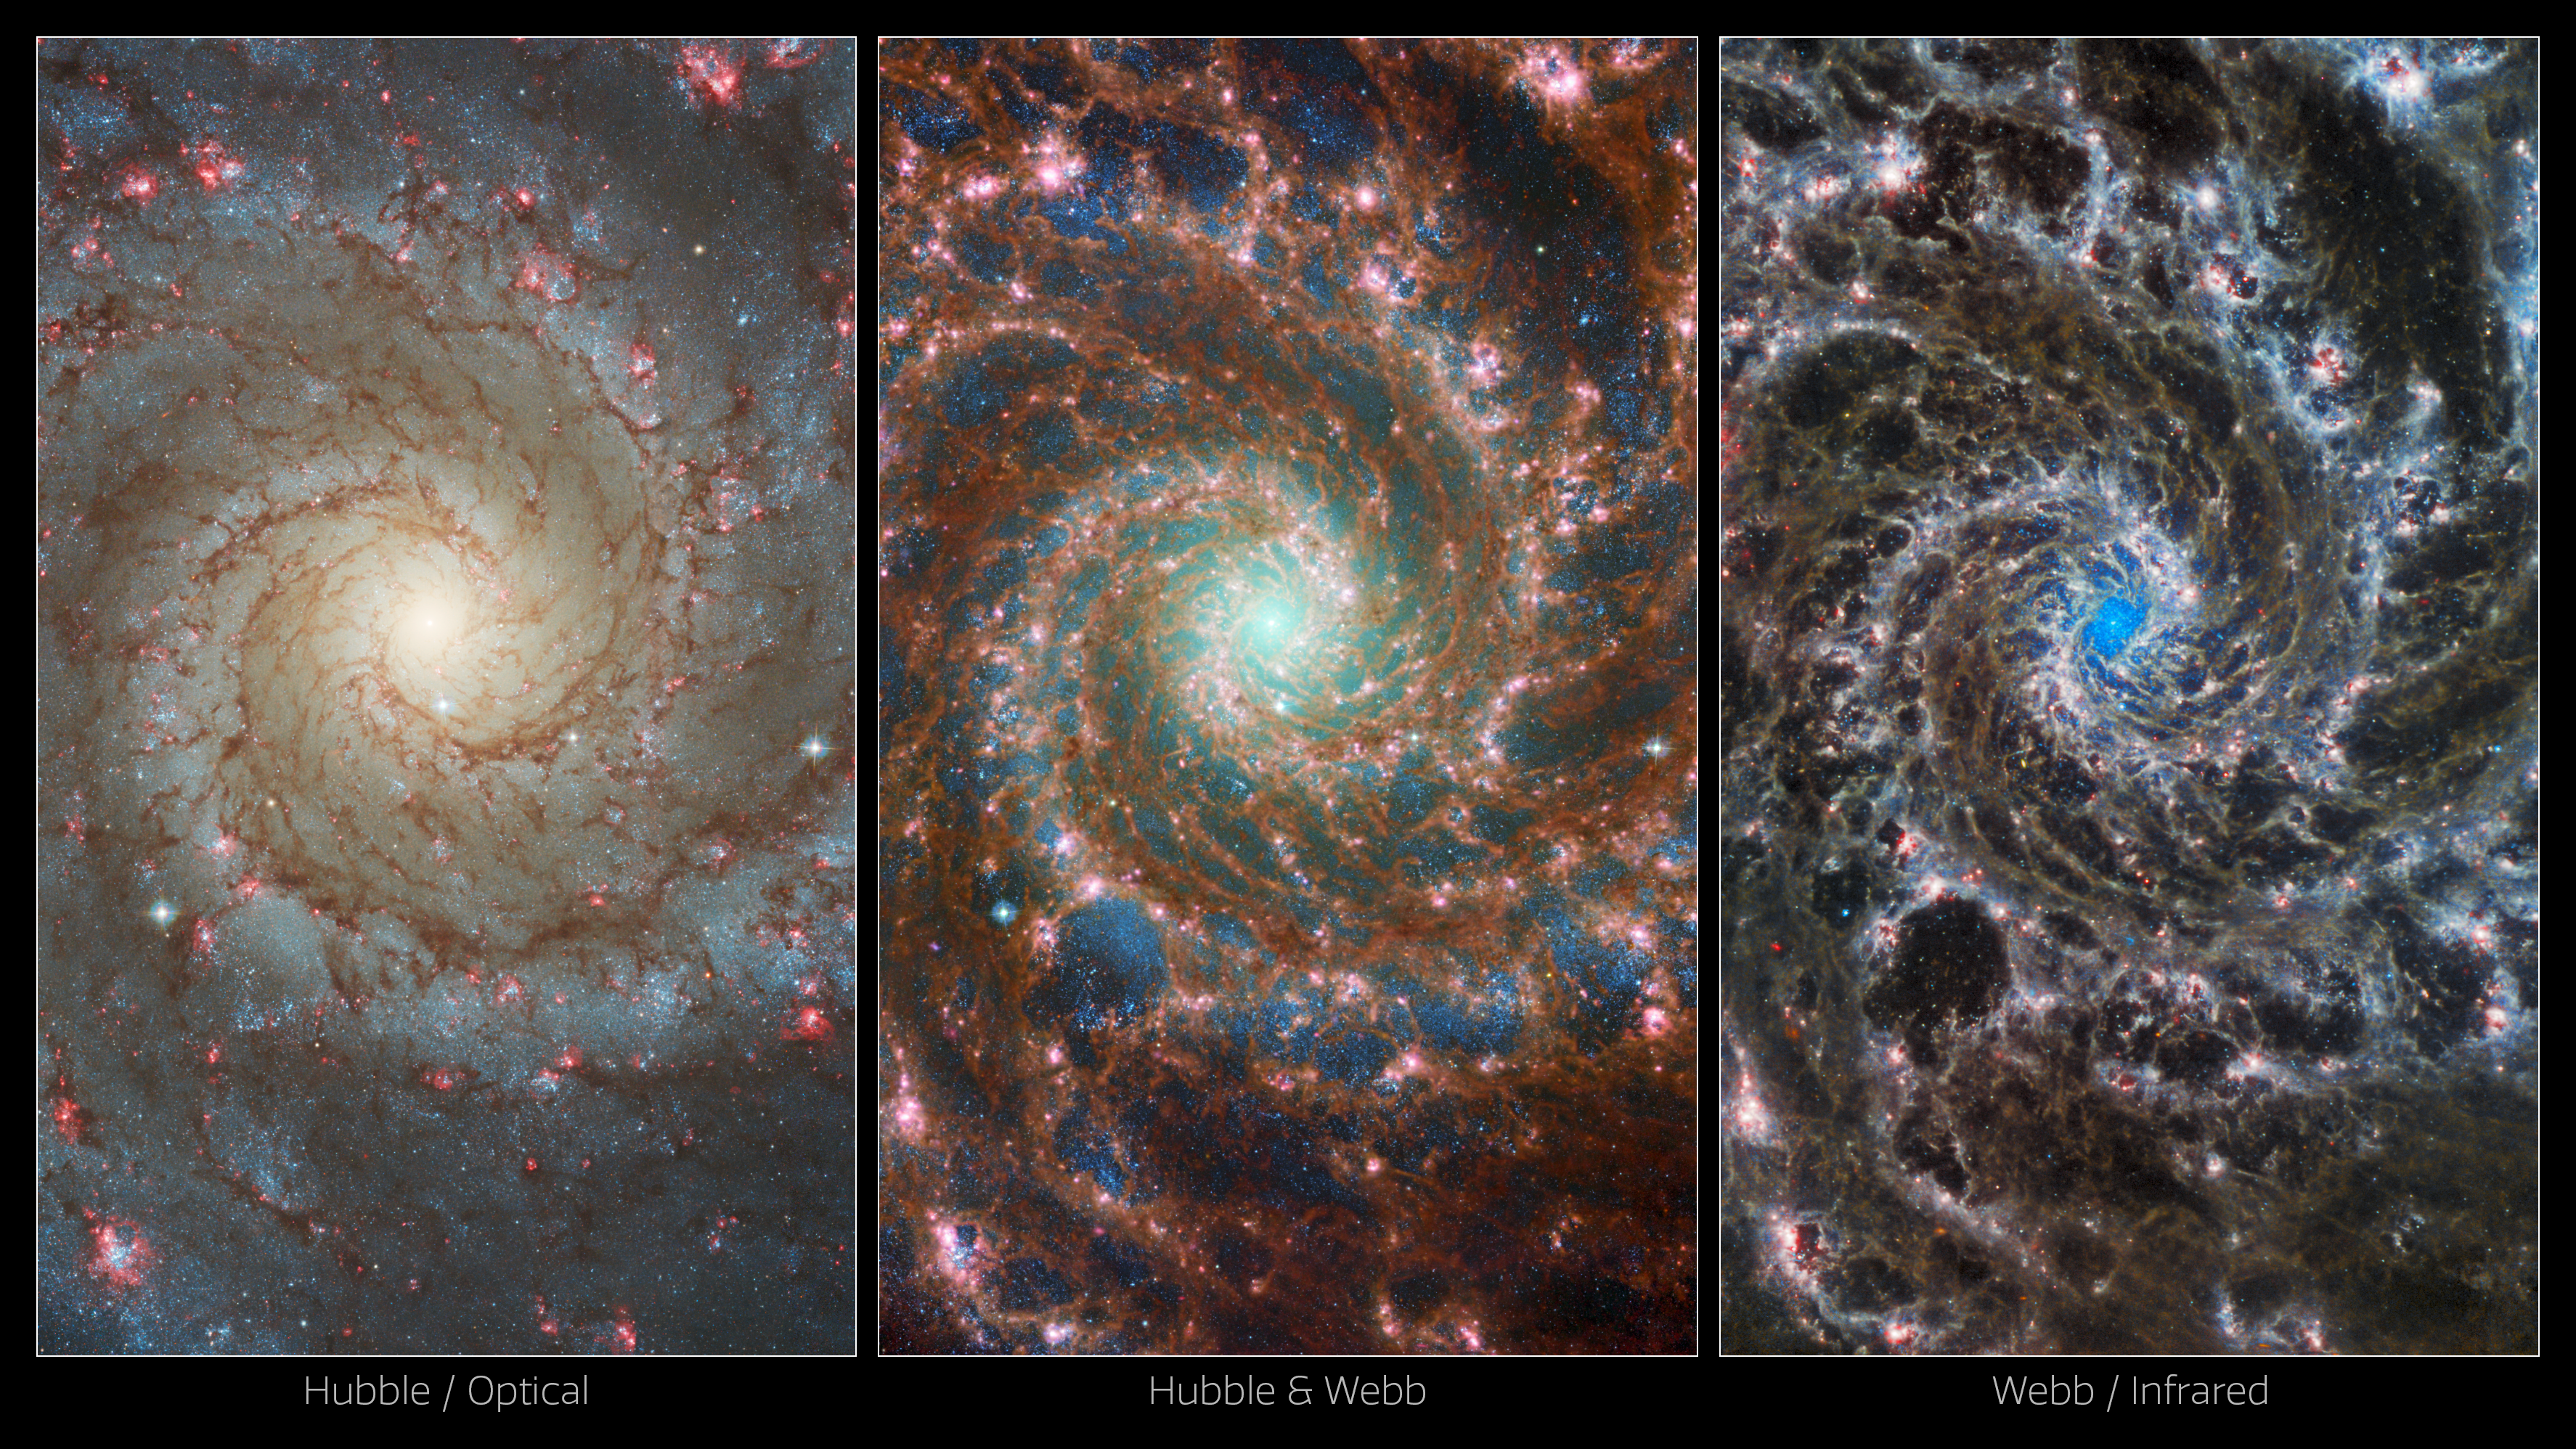

Multi-Observatory Views of M74

New images of the Phantom Galaxy, M74, showcase the power of space observatories working together in multiple wavelengths. On the left, the NASA/ESA Hubble Space Telescope’s view of the galaxy ranges from the older, redder stars towards the centre, to younger and bluer stars in its spiral arms, to the most active stellar formation in the red bubbles of H II regions. On the right, the NASA/ESA/CSA James Webb Space Telescope’s image is strikingly different, instead highlighting the masses of gas and dust within the galaxy’s arms, and the dense cluster of stars at its core. The combined image in the centre merges these two for a truly unique look at this “grand design” spiral galaxy.

Scientists combine data from telescopes operating across the electromagnetic spectrum to truly understand astronomical objects. In this way, data from Hubble and Webb compliment each other to provide a comprehensive view of the spectacular M74 galaxy.

Credit: ESA/Webb, NASA & CSA, J. Lee and the PHANGS-JWST Team; ESA/Hubble & NASA, R. Chandar Acknowledgement: J. Schmidt